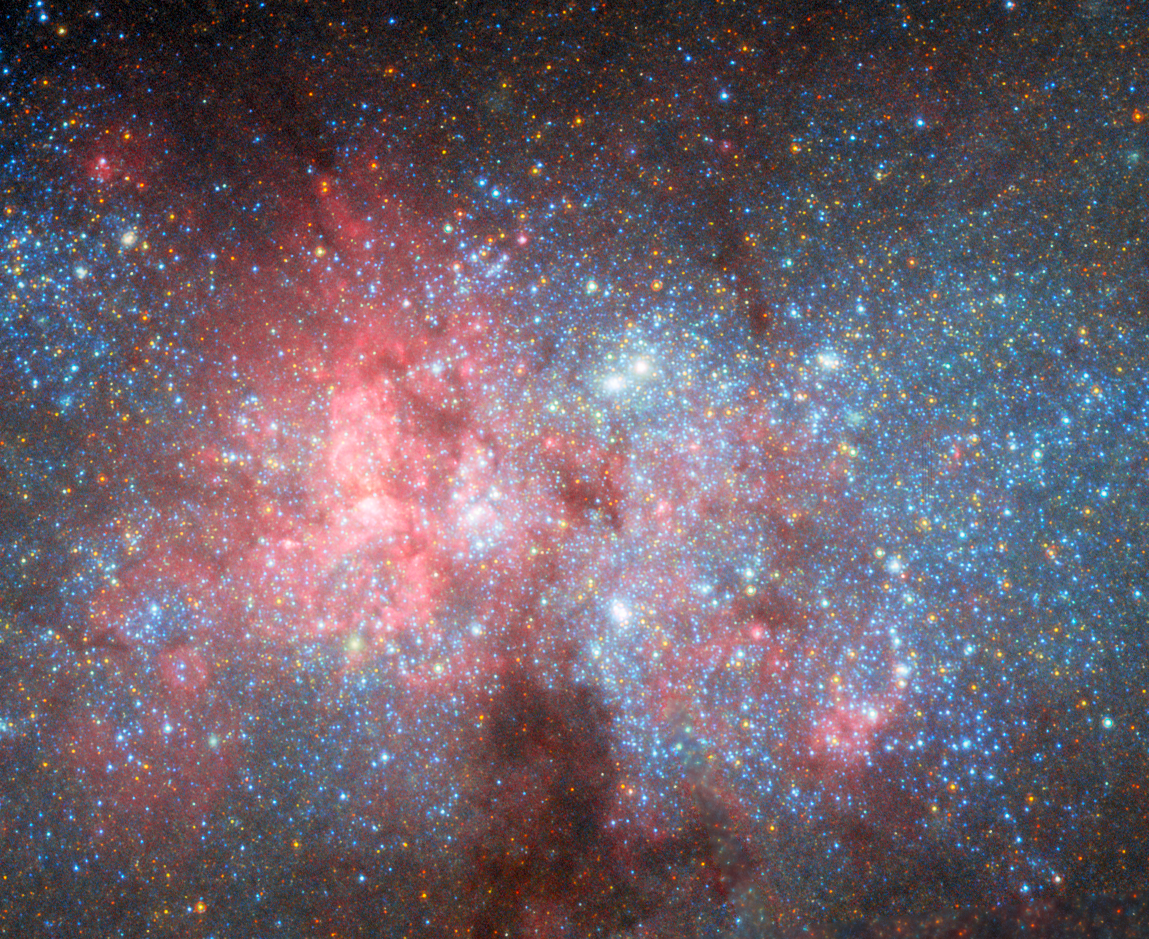

NGC 5253 (ACS/HRC)

This image depicts the blue compact dwarf galaxy NGC 5253, as seen by the High Resolution Channel (HRC) of Hubble’s Advanced Camera for Surveys (ACS).

ACS is a third-generation scientific instrument on Hubble, and was installed in 2002 during Servicing Mission 3B. It originally had three sub-instruments or 'channels': the Wide Field Channel (WFC), as its name and the name of ACS both suggest, is used to survey broad fields of distant and faint galaxies including the famous Hubble Ultra Deep Field, while the Solar Blind Channel is optimised for viewing ultraviolet light emitted by planets like Jupiter by blocking out sunlight. Both of these are still operational.

HRC is the third channel, and it was designed to take a close and extremely detailed look into the centre of celestial objects like the centres of galaxies, star clusters and star-forming regions. Its high resolution allowed astronomers to distinguish many stars in a small area, allowing them to examine dense regions in depth. NGC 5253, a starburst galaxy filled with extraordinary star clusters and continually forming stars, is a perfect target for ACS with HRC. This image shows the galaxy’s nucleus in detail, where super star clusters lurk amongst the dark dust clouds. A broader view of the galaxy can be seen here.

HRC was only operational for about five years, between the installation of ACS and the electronics failures in 2007 that took it offline. While ACS was partially repaired in Hubble’s last servicing mission in 2009, HRC could not be restored. Close-in, high-resolution images of galaxy cores like this one are, therefore, something of a rarity.

Credit: ESA/Hubble & NASA, W. D. Vacca